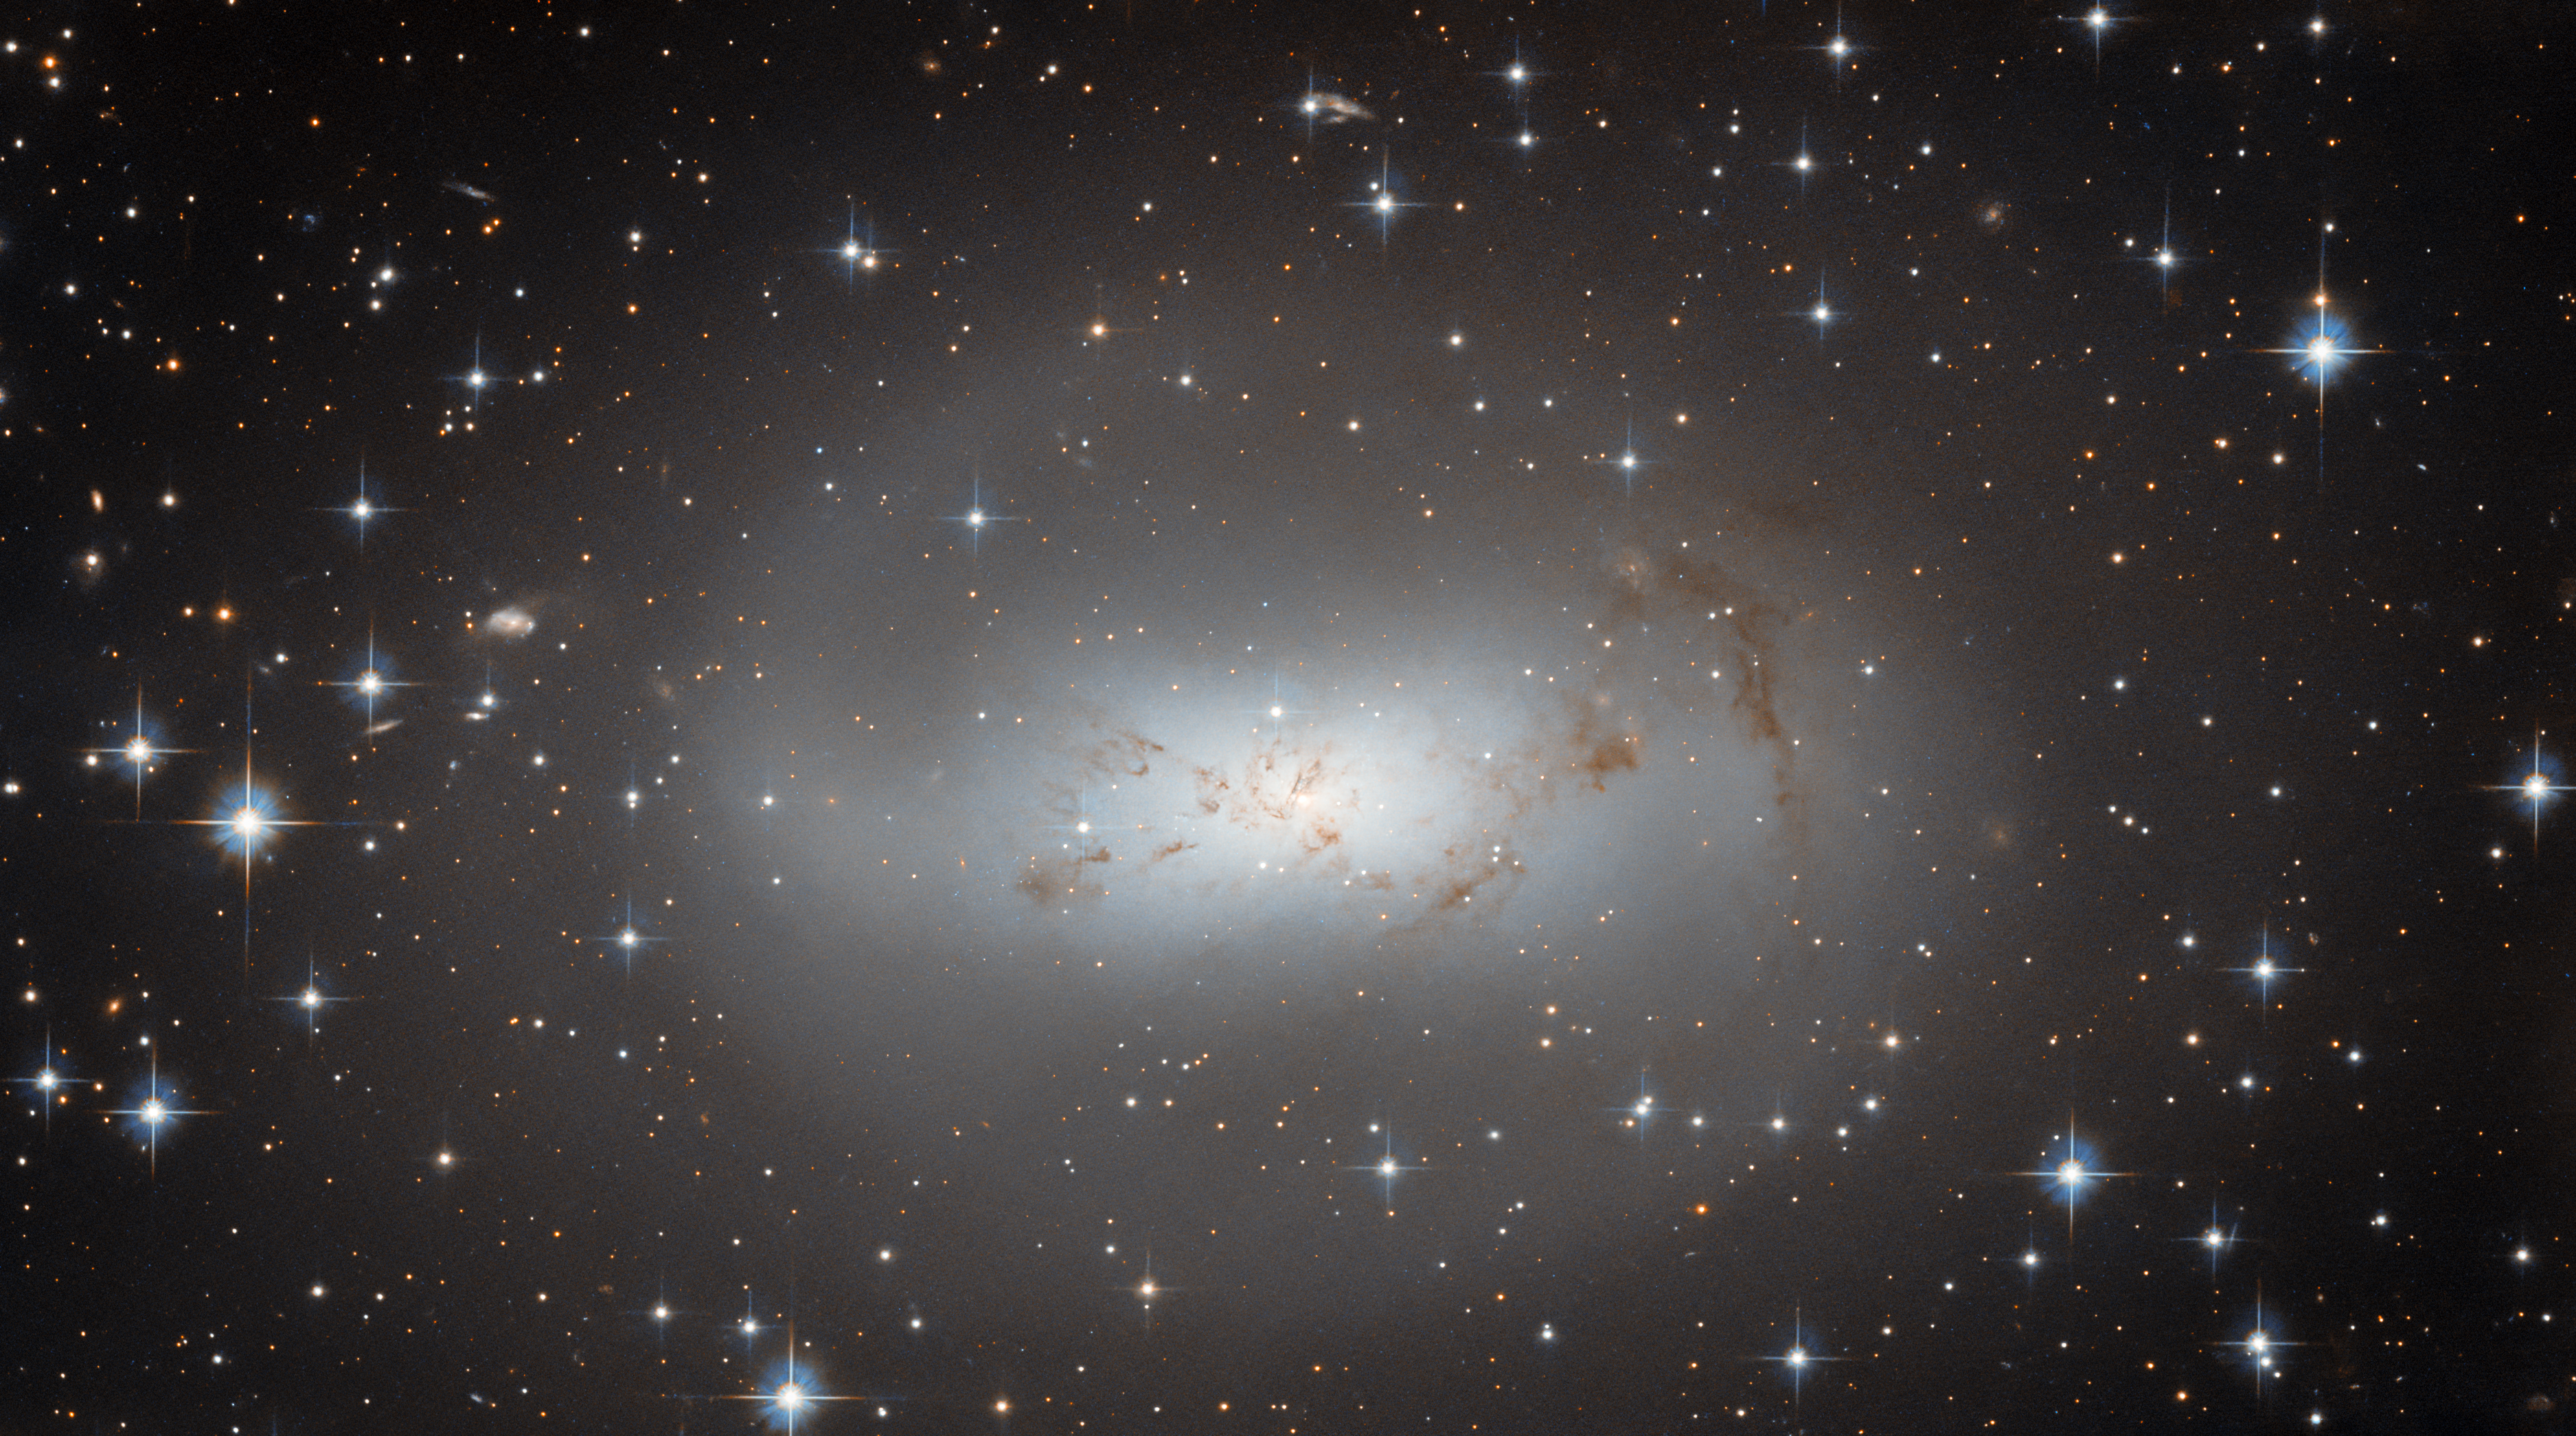

Hubble checks in on the neighbours

The highly irregular galaxy ESO 174-1, which resembles a lonely, hazy cloud against a backdrop of bright stars, dominates this image from the NASA/ESA Hubble Space Telescope. ESO 174-1 lies around 11 million light-years from Earth and consists of a bright cloud of stars and a faint, meandering tendril of dark gas and dust.

This image is part of a collection of Hubble observations that aims to get to know our nearby galactic neighbours. To be more precise, the observations aim to resolve the brightest stars and basic properties of every known galaxy within 10 megaparsecs. A parsec is a unit used by astronomers to measure the vast distances to other galaxies — 10 megaparsecs translates to 32 million light-years — and makes astronomical distances easier to handle. For example, the nearest star to the Sun, Proxima Centauri, is about 1.3 parsecs away. In everyday units this is a staggering 40 million million kilometres!

The programme to capture all of our neighbouring galaxies was designed to use the 2-3% of Hubble time that absolutely no other observing programme can use. Many of the myriad objects that Hubble observes can only be seen at certain times of year, which makes filling out the observatory’s schedule a daunting logistical challenge. Observing programmes such as the one which captured ESO 174-1 help Hubble’s operators get the most out of every last minute of observing time.

Credit: ESA/Hubble & NASA, R. Tully